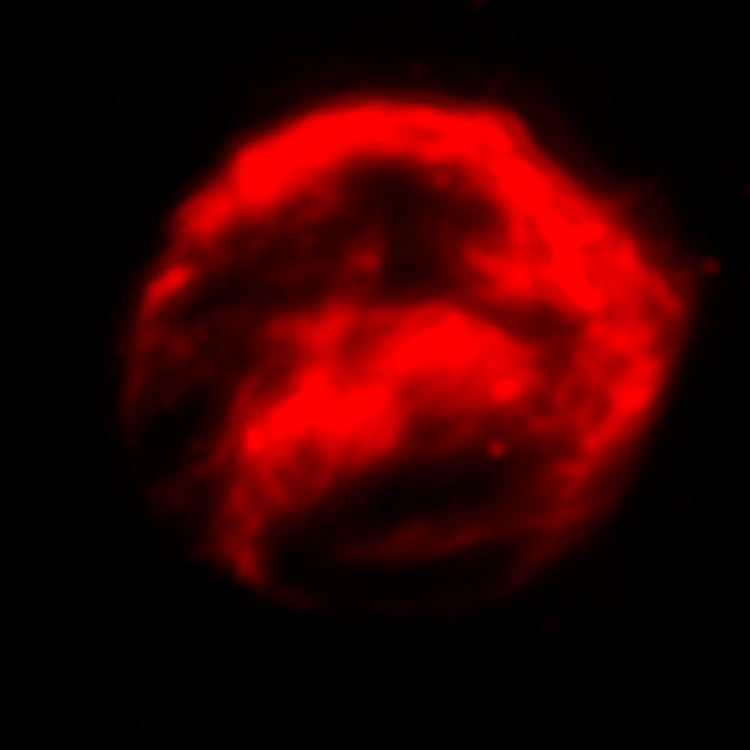

Spitzer Space Telescope Infrared Data of Kepler's Supernova Remnant

Kepler's Supernova remnant, as seen by the Infrared Spitzer Space Telescope.

Credit: NASA, ESA, R. Sankrit and W. Blair (Johns Hopkins University)